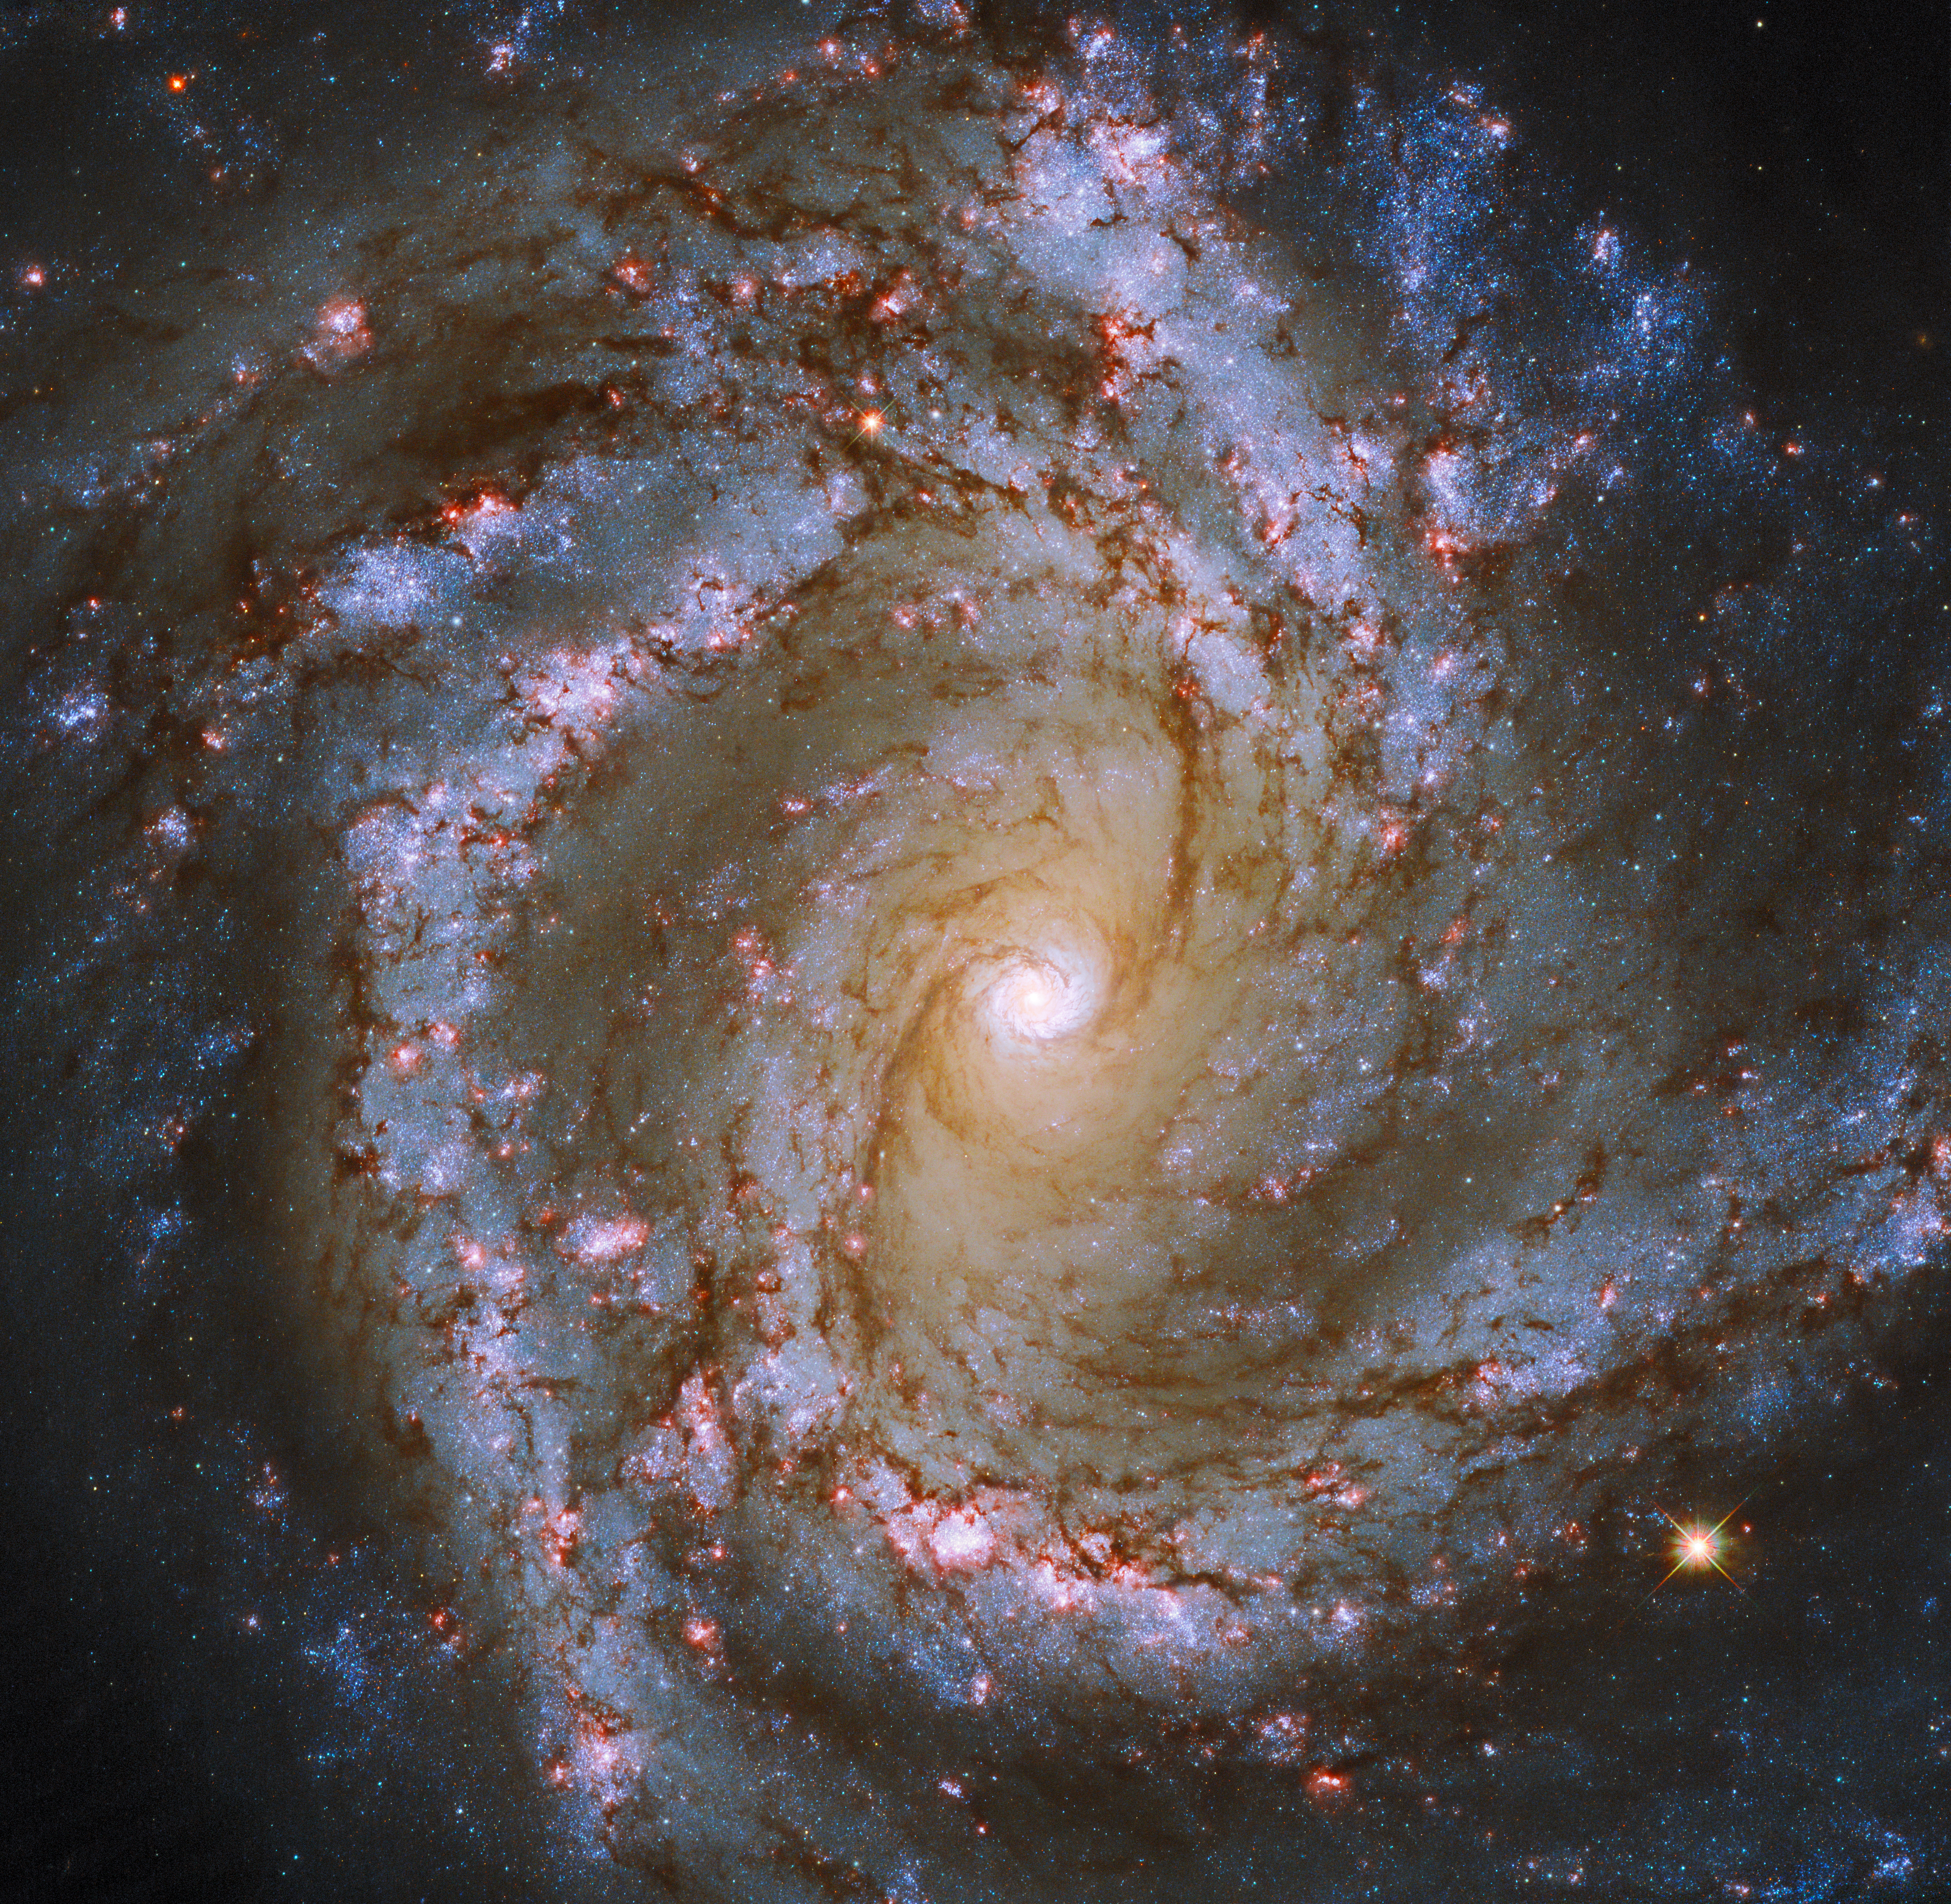

Spiral Snapshot

The luminous heart of the galaxy M61 dominates this image, framed by its winding spiral arms threaded with dark tendrils of dust. As well as the usual bright bands of stars, the spiral arms of M61 are studded with ruby-red patches of light. Tell-tale signs of recent star formation, these glowing regions lead to M61’s classification as a starburst galaxy.

Though the gleaming spiral of this galaxy makes for a spectacular sight, one of the most interesting features of M61 lurks unseen at the centre of this image. As well as widespread pockets of star formation, M61 hosts a supermassive black hole more than 5 million times as massive as the Sun.

M61 appears almost face-on, making it a popular subject for astronomical images, even though the galaxy lies more than 52 million light-years from Earth. This particular astronomical image incorporates data from not only Hubble, but also the FORS camera at the European Southern Observatory’s Very Large Telescope, together revealing M61 in unprecedented detail. This striking image is one of many examples of telescope teamwork — astronomers frequently combine data from ground-based and space-based telescopes to learn more about the Universe.

Credit: ESA/Hubble & NASA, ESO, J. Lee and the PHANGS-HST Team